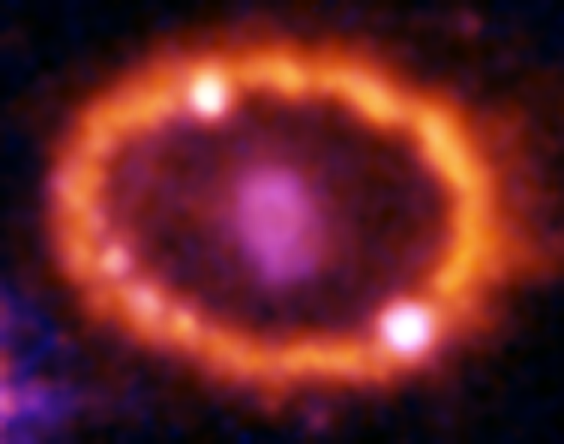

Hubble Supernova 1987A Scrapbook (1994-2003) - Image 10

in 1987, astronomers spotted the brightest stellar explosion ever seen since the one observed by Johannes Kepler over 400 years ago. Called SN 1987A, the titanic supernova explosion blazed with the power of 100,000,000 suns for several months following its discovery on Feb. 23 of that year. Although the supernova itself is over a million times fainter than when it was first discovered, a new light show in the space surrounding it is just beginning.

Credit: NASA/ESA, P. Challis, R. Kirshner (Harvard-Smithsonian Center for Astrophysics) and B. Sugerman (STScI)